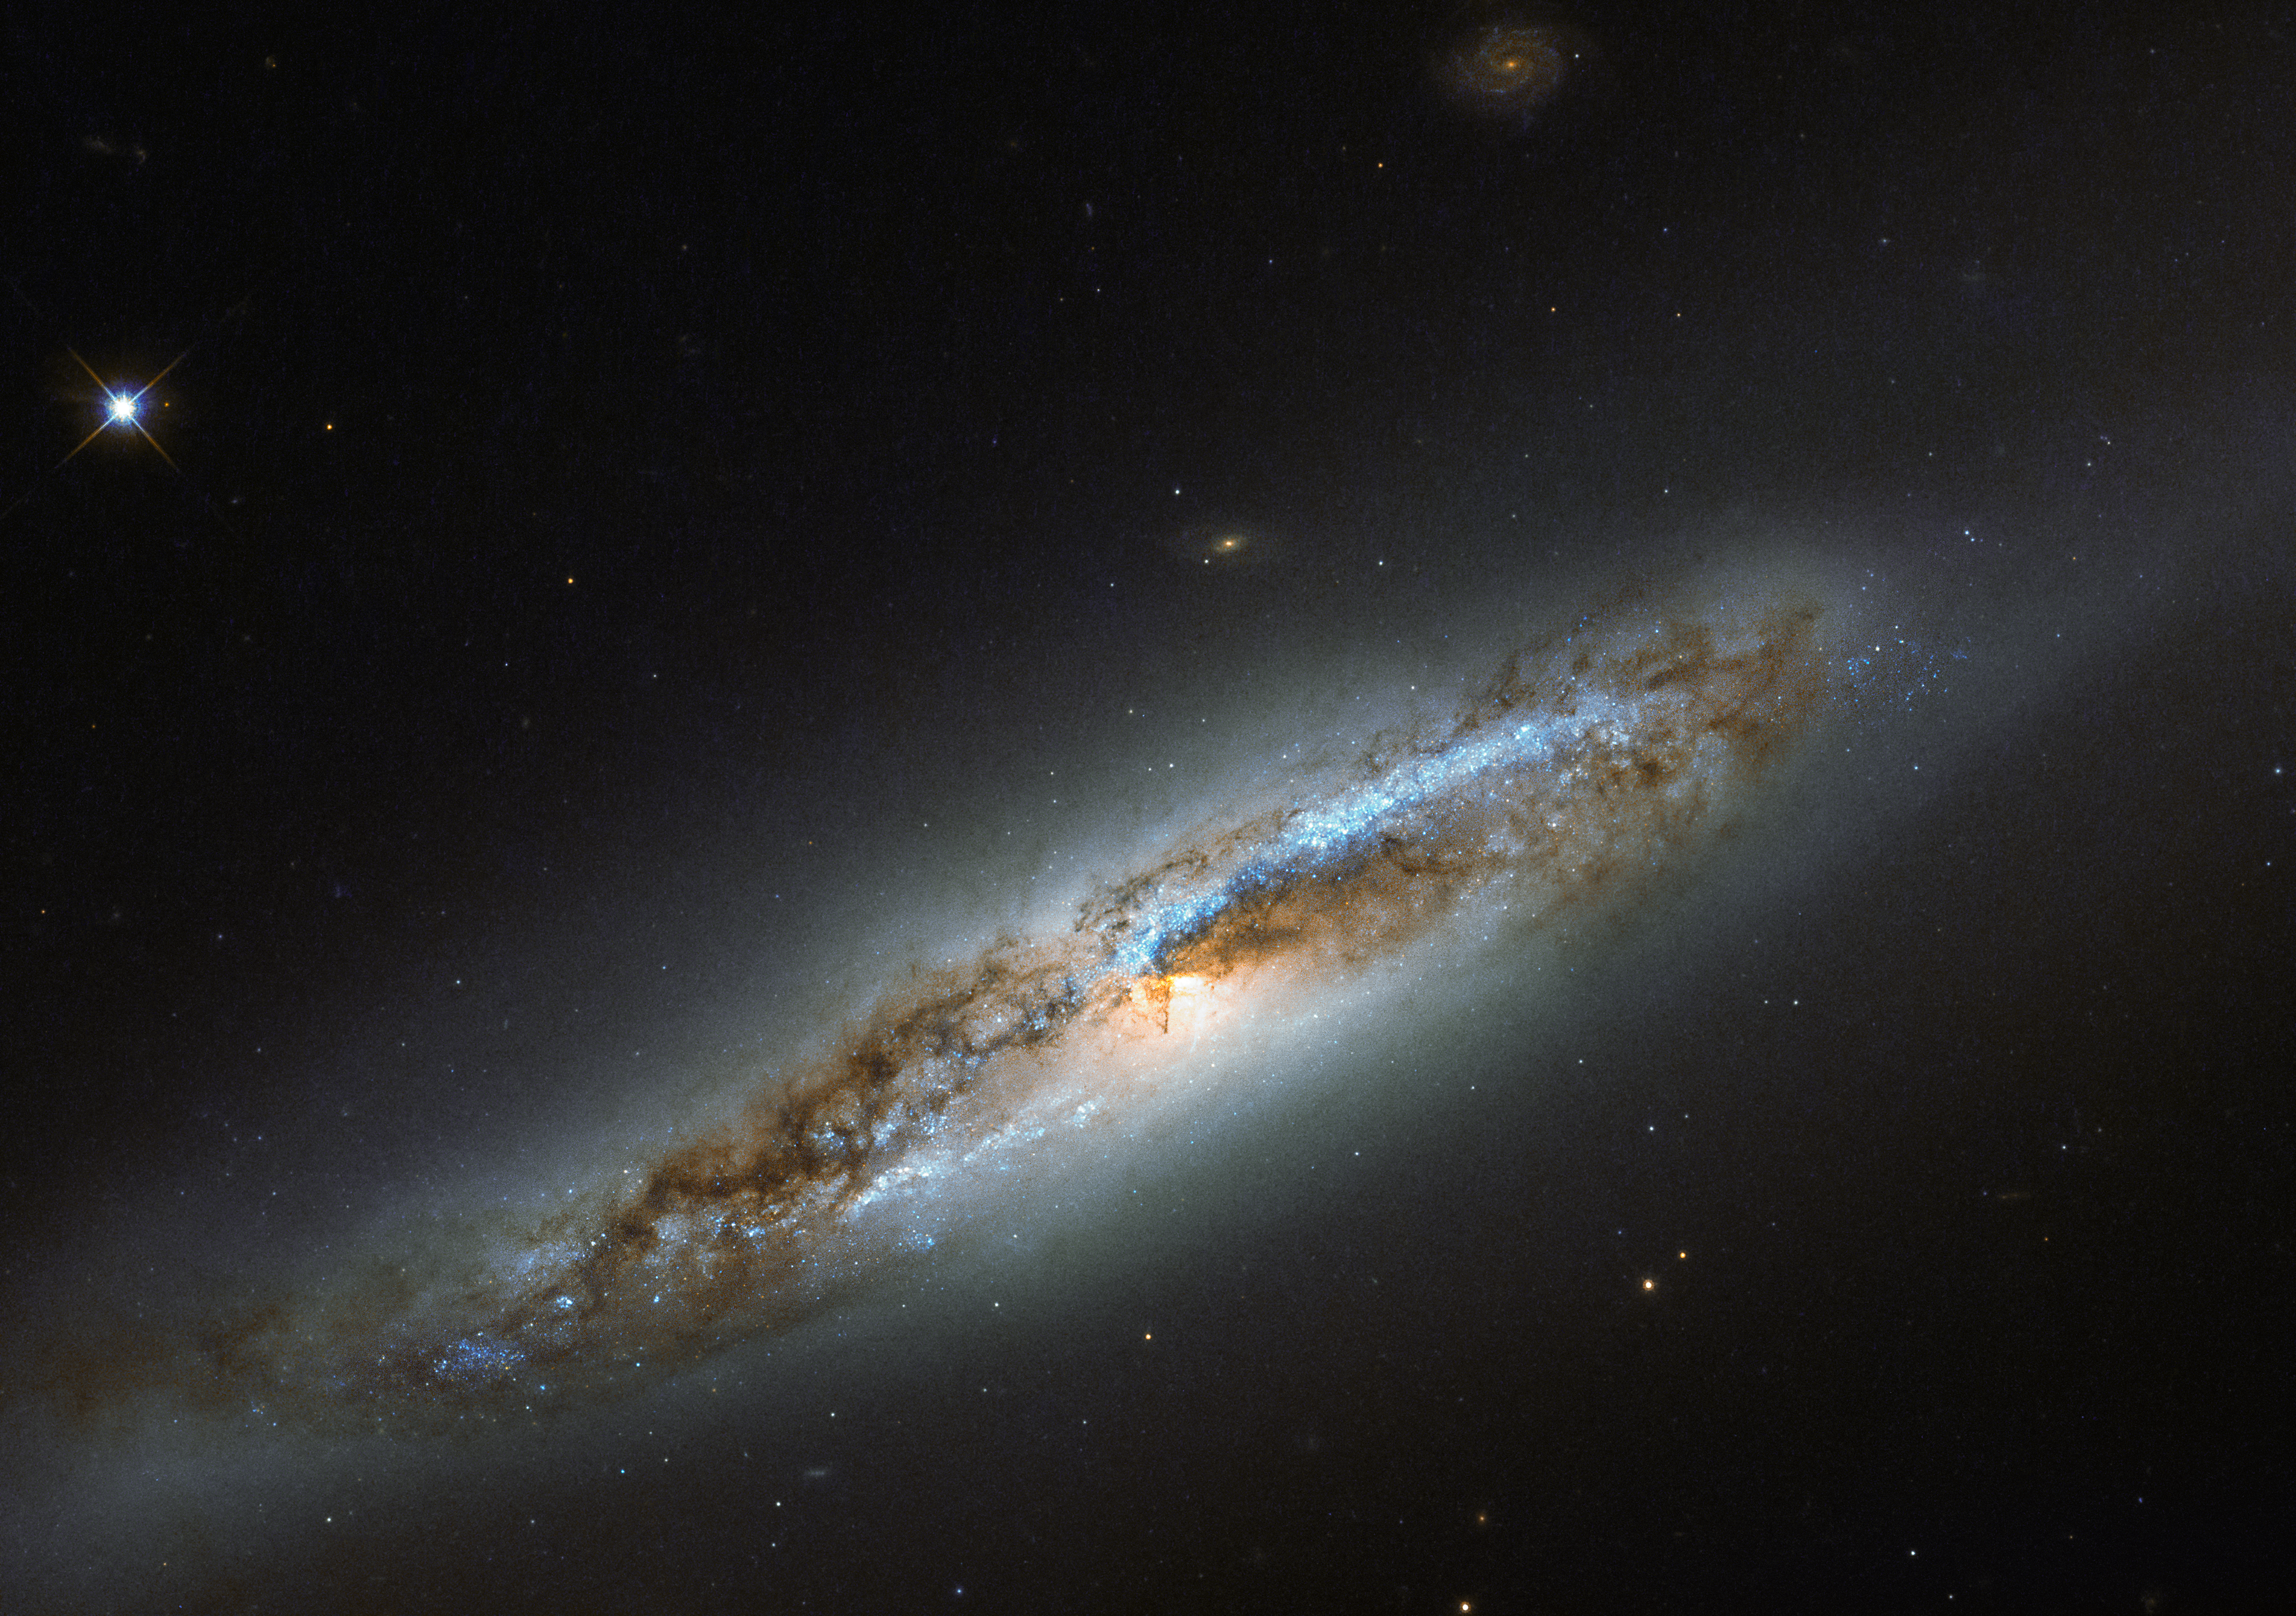

A transformation in Virgo

The constellation of Virgo (The Virgin) is especially rich in galaxies, due in part to the presence of a massive and gravitationally-bound collection of over 1300 galaxies called the Virgo Cluster. One particular member of this cosmic community, NGC 4388, is captured in this image, as seen by the NASA/ESA Hubble Space Telescope’s Wide Field Camera 3 (WFC3).

Located some 60 million light-years away, NGC 4388 is experiencing some of the less desirable effects that come with belonging to such a massive galaxy cluster. It is undergoing a transformation, and has taken on a somewhat confused identity.

While the galaxy’s outskirts appear smooth and featureless, a classic feature of an elliptical galaxy, its centre displays remarkable dust lanes constrained within two symmetric spiral arms, which emerge from the galaxy’s glowing core — one of the obvious features of a spiral galaxy. Within the arms, speckles of bright blue mark the locations of young stars, indicating that NGC 4388 has hosted recent bursts of star formation.

Despite the mixed messages, NGC 4388 is classified as a spiral galaxy. Its unusual combination of features are thought to have been caused by interactions between NGC 4388 and the Virgo Cluster. Gravitational interactions — from glancing blows to head-on collisions, tidal influencing, mergers, and galactic cannibalism — can be devastating to galaxies. While some may be lucky enough to simply suffer a distorted spiral arm or newly-triggered wave of star formation, others see their structure and contents completely and irrevocably altered.

Credit: ESA/Hubble & NASA